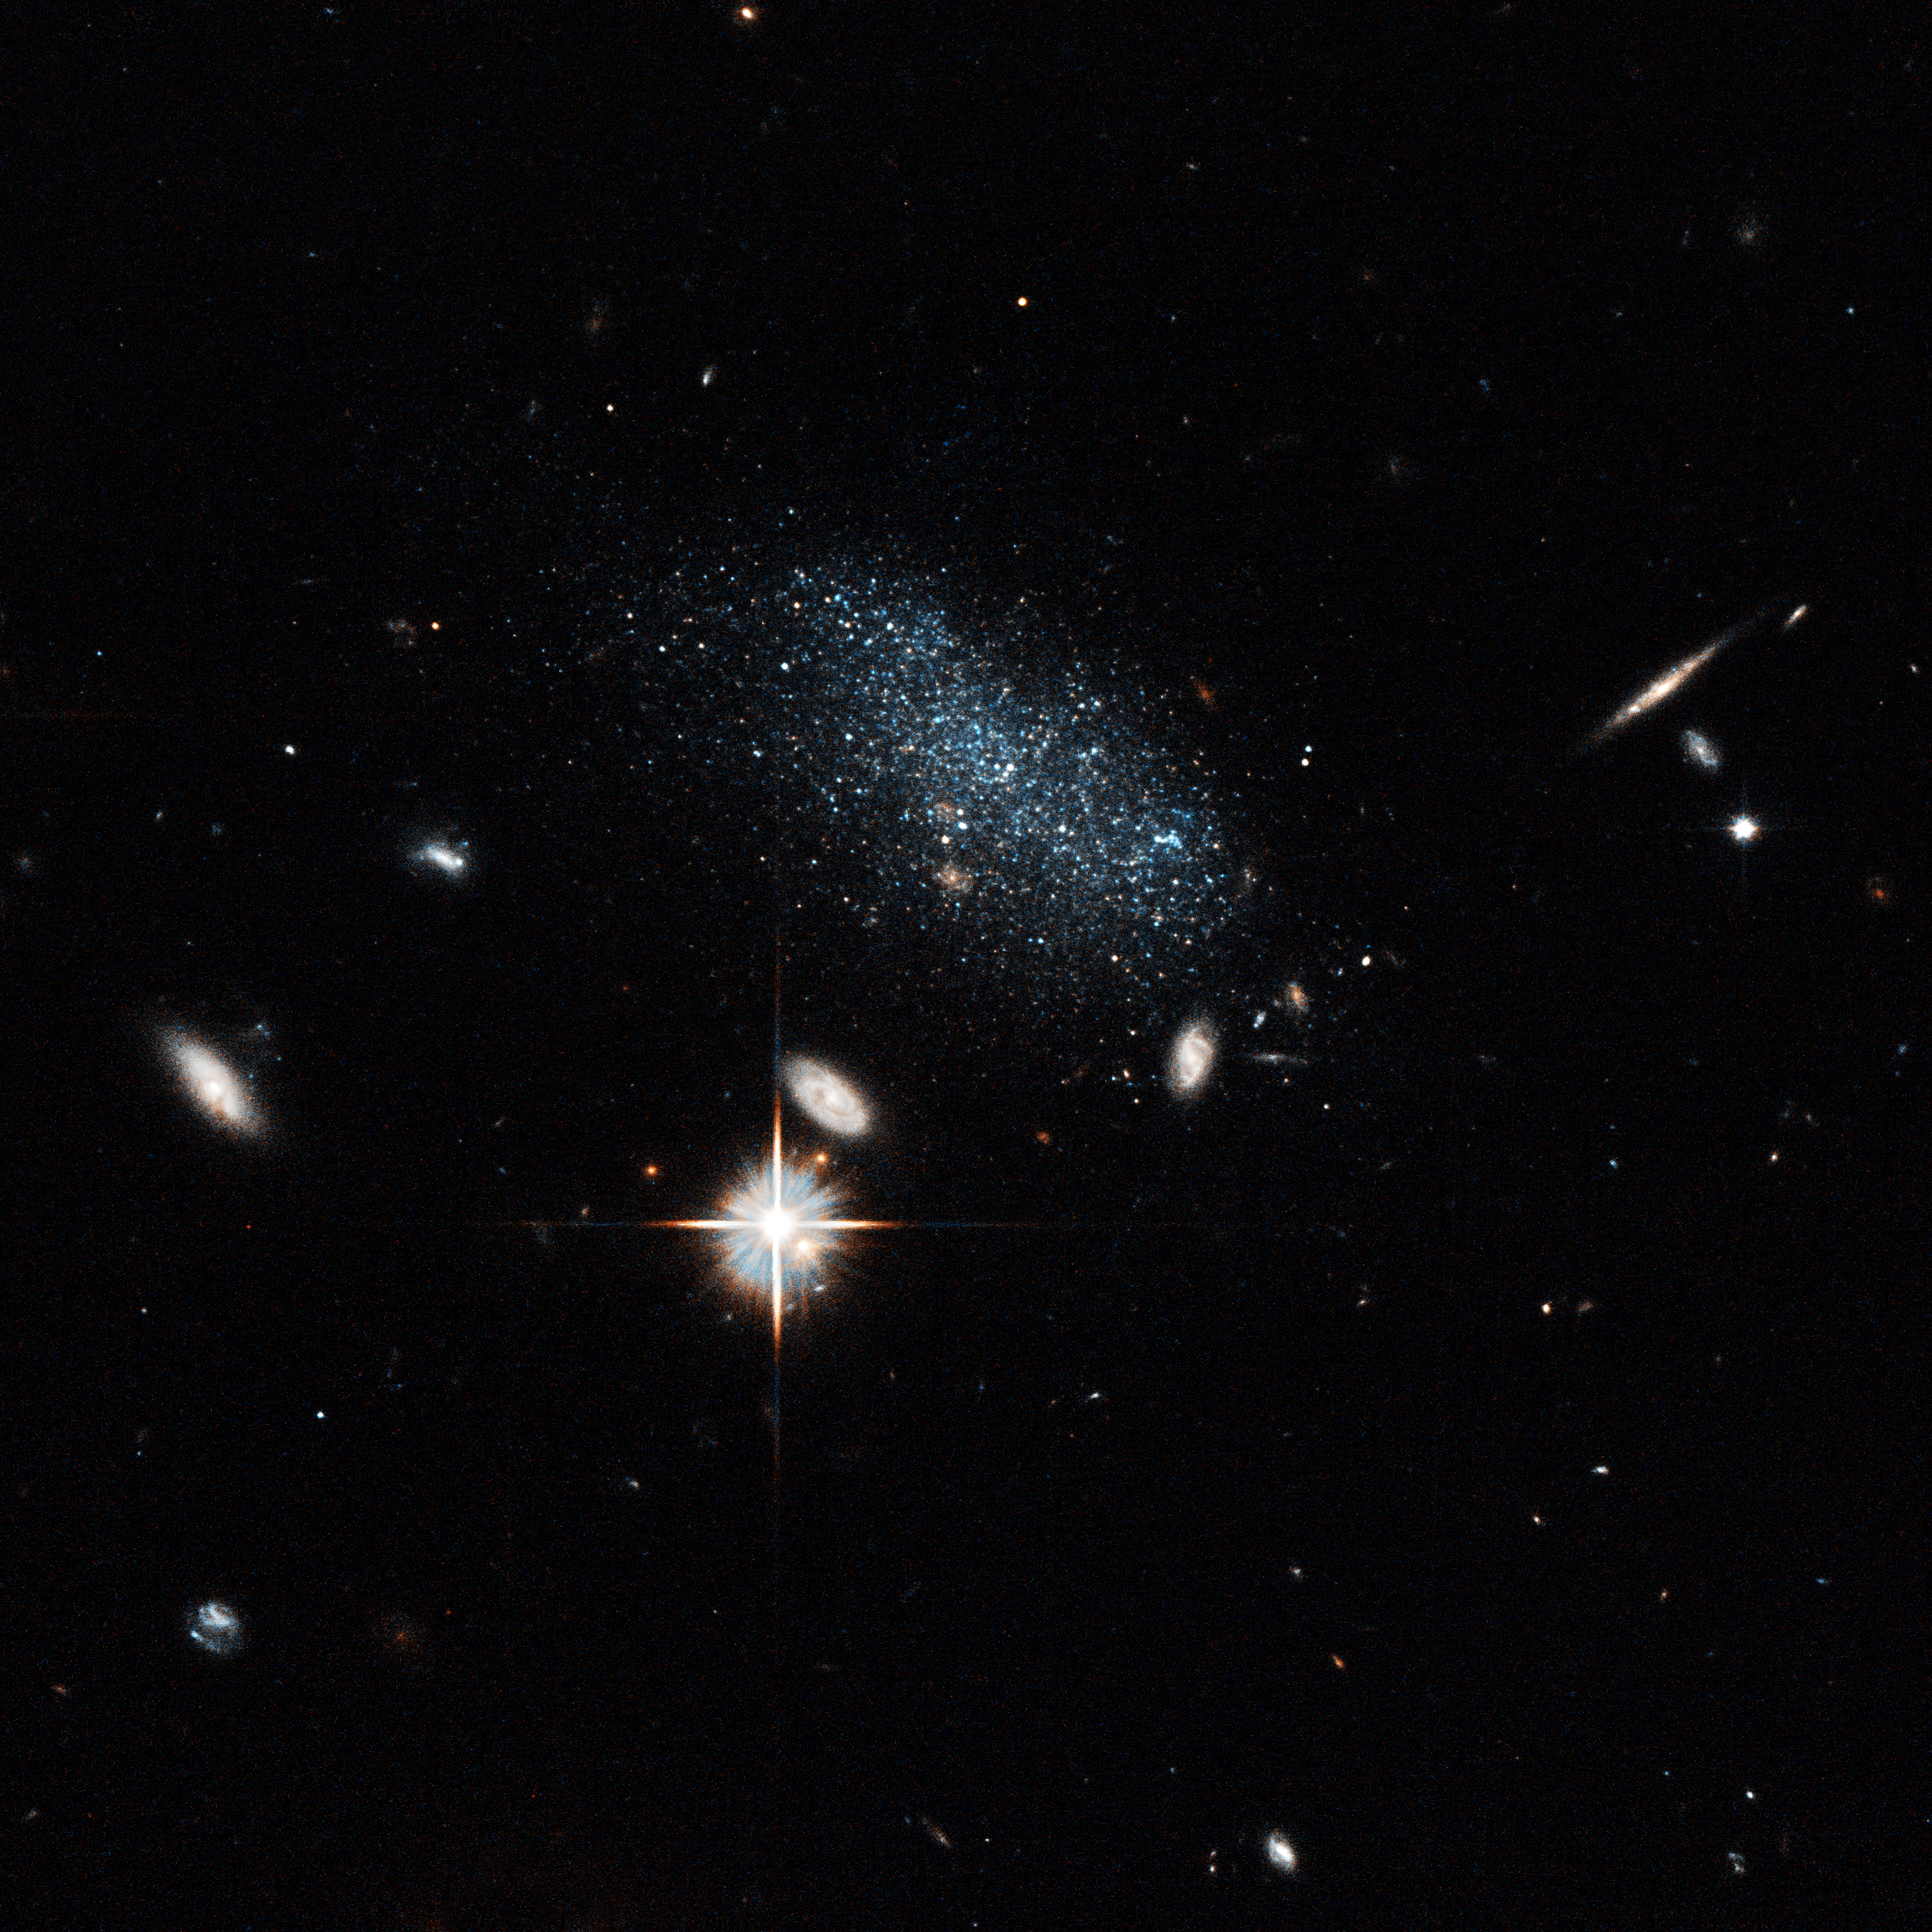

Dwarf galaxy Pisces B

This image shows the galaxy Pisces B. The bright object with the diffraction spikes below left of centre is a foreground star in our Milky Way galaxy. Several distant background galaxies are also visible. Pisces B is about 30 million light-years away.

Credit: NASA, ESA, and E. Tollerud (STScI)